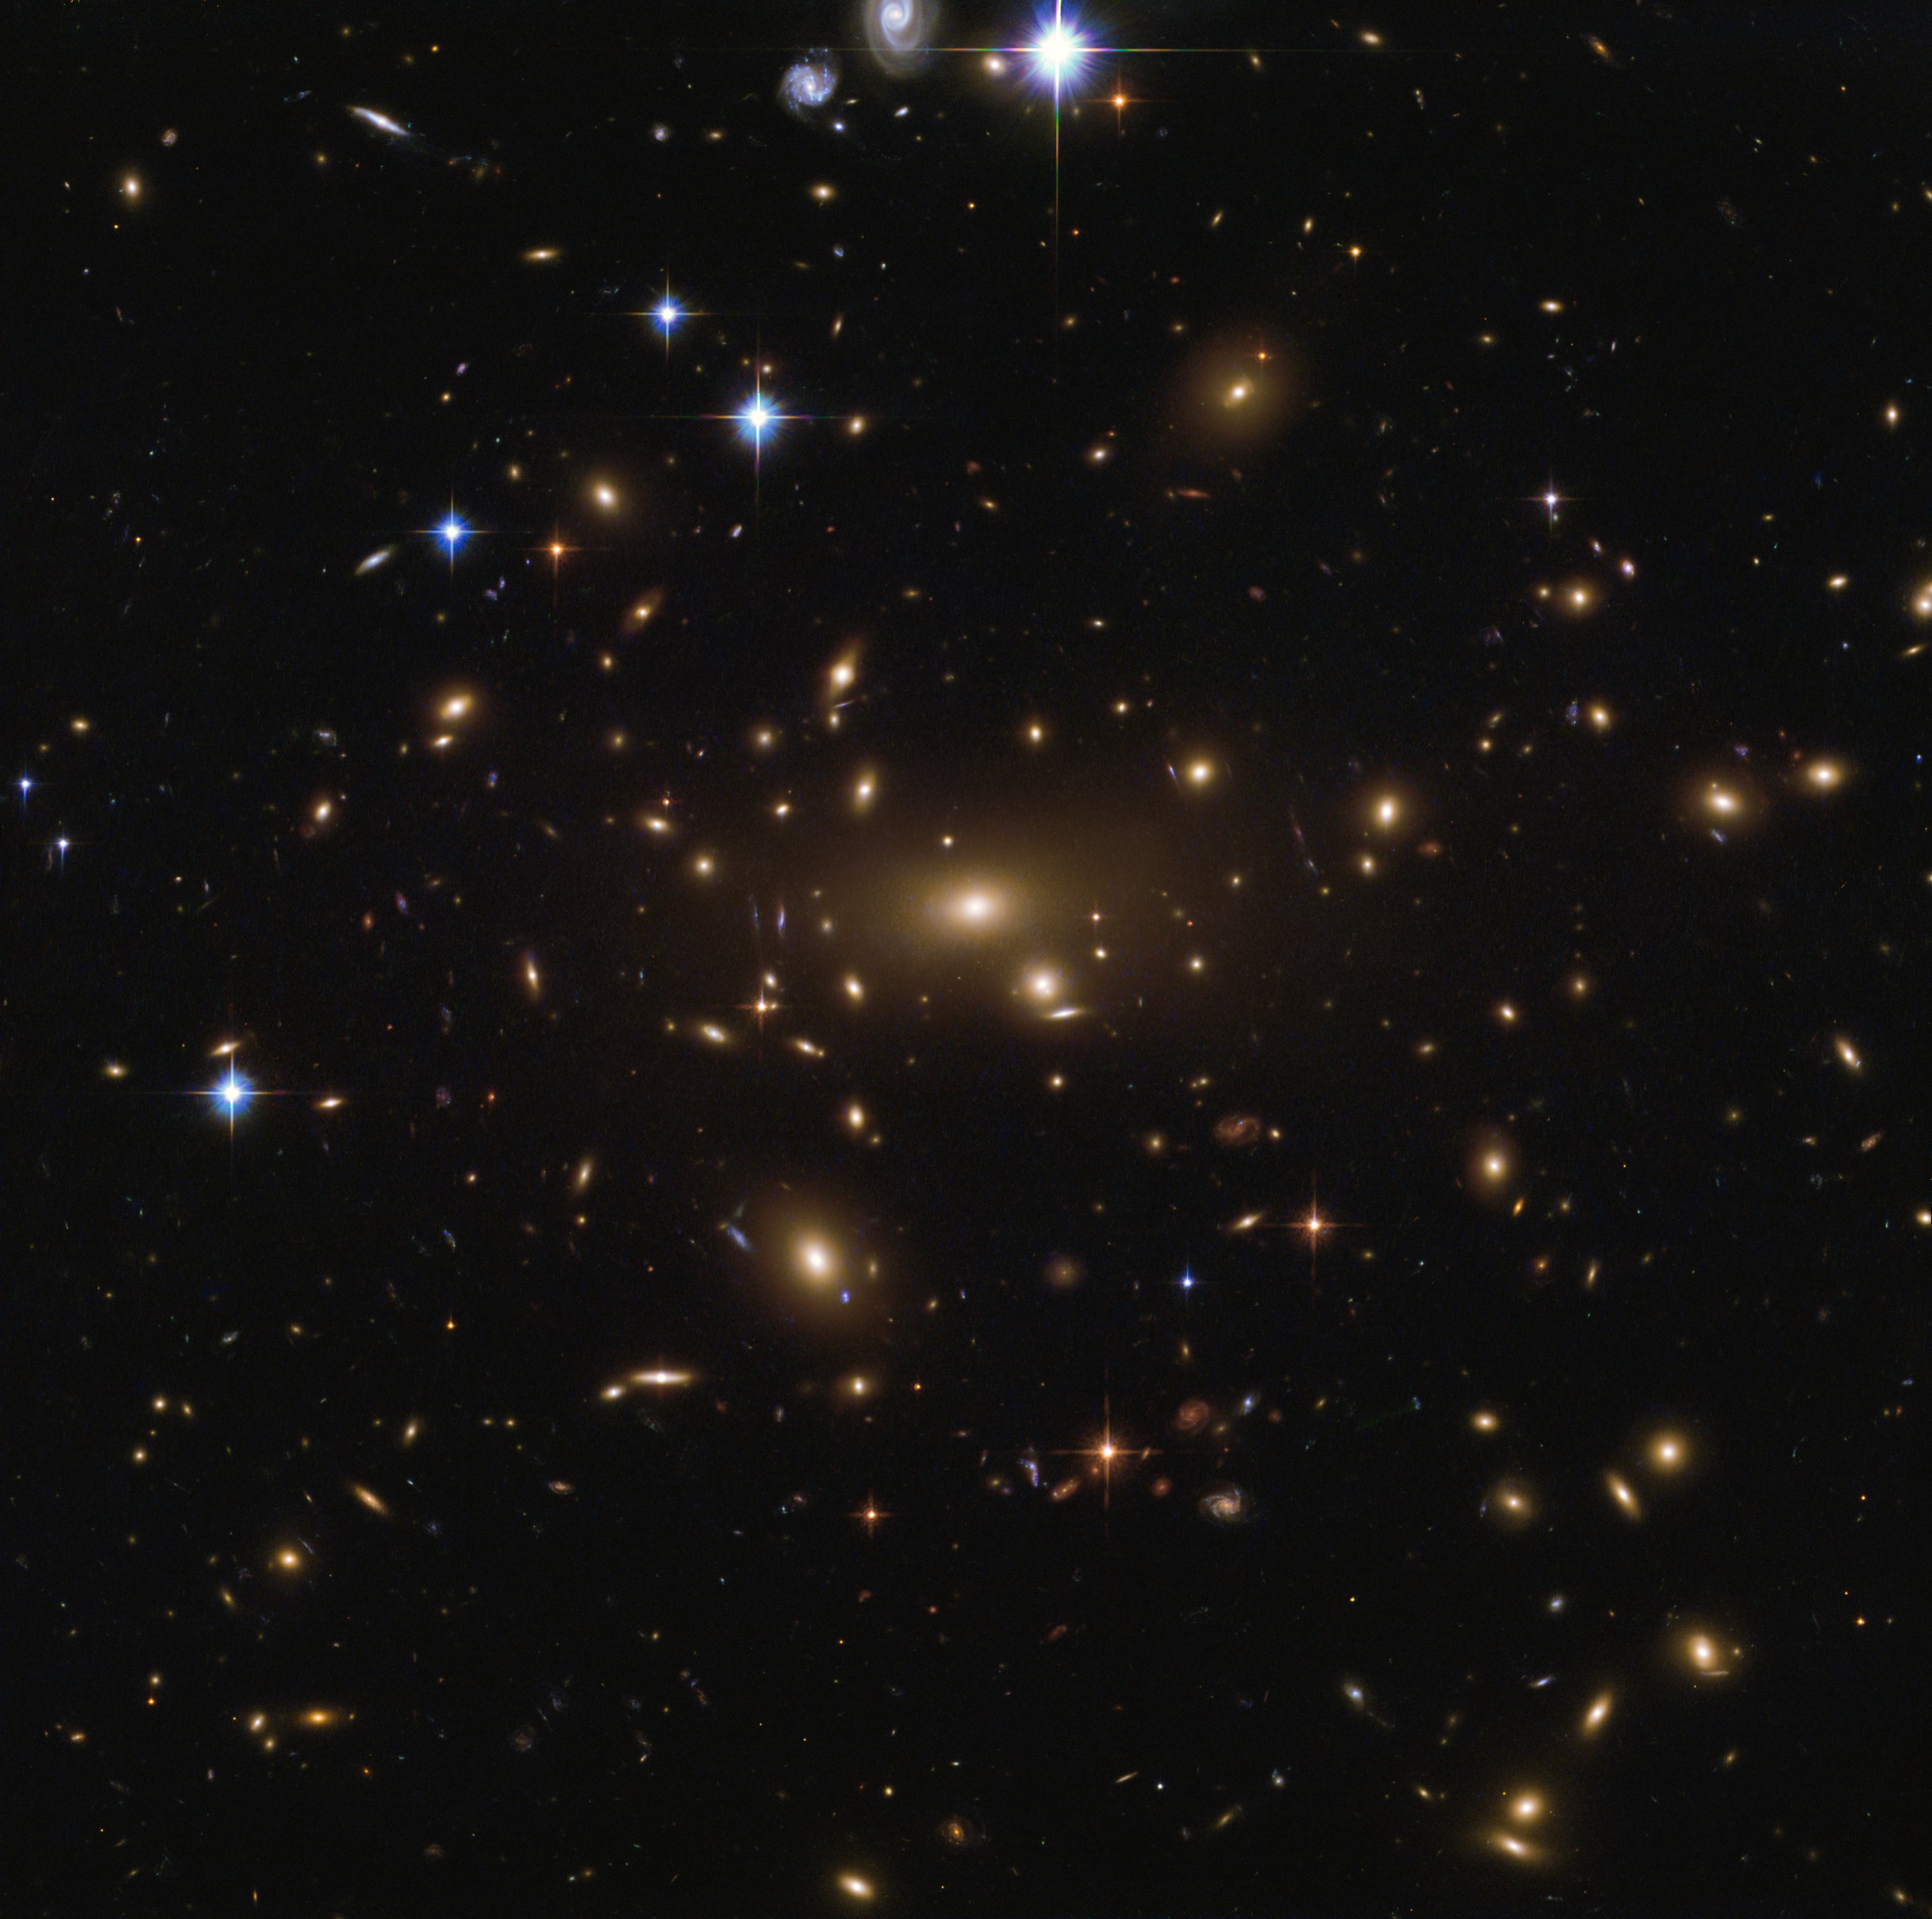

Abell’s richest cluster

The Universe contains some truly massive objects. Although we are still unsure how such gigantic things come to be, the current leading theory is known as hierarchical clustering, whereby small clumps of matter collide and merge to grow ever larger. The 14-billion-year history of the Universe has seen the formation of some enormous cosmic structures, including galaxy groups, clusters, and superclusters — the largest known structures in the cosmos!

This particular cluster is called Abell 665. It was named after its discoverer, George O. Abell, who included it in his seminal 1958 cluster catalogue. Abell 665 is located in the well-known northern constellation of Ursa Major (The Great Bear). This incredible image combines visible and infrared light gathered by the NASA/ESA Hubble Space Telescope using two of its cameras: the Advanced Camera for Surveys and the Wide Field Camera 3.

Abell 665 is the only galaxy cluster in Abell’s entire catalogue to be given a richness class of 5, indicating that the cluster contains at least 300 individual galaxies. Because of this richness, the cluster has been studied extensively at all wavelengths, resulting in a number of fascinating discoveries — among other research, Abell 665 has been found to host a giant radio halo, powerful shockwaves, and has been used to calculate an updated value for the Hubble constant (a measure of how fast the Universe is expanding).

Credit: ESA/Hubble & NASA